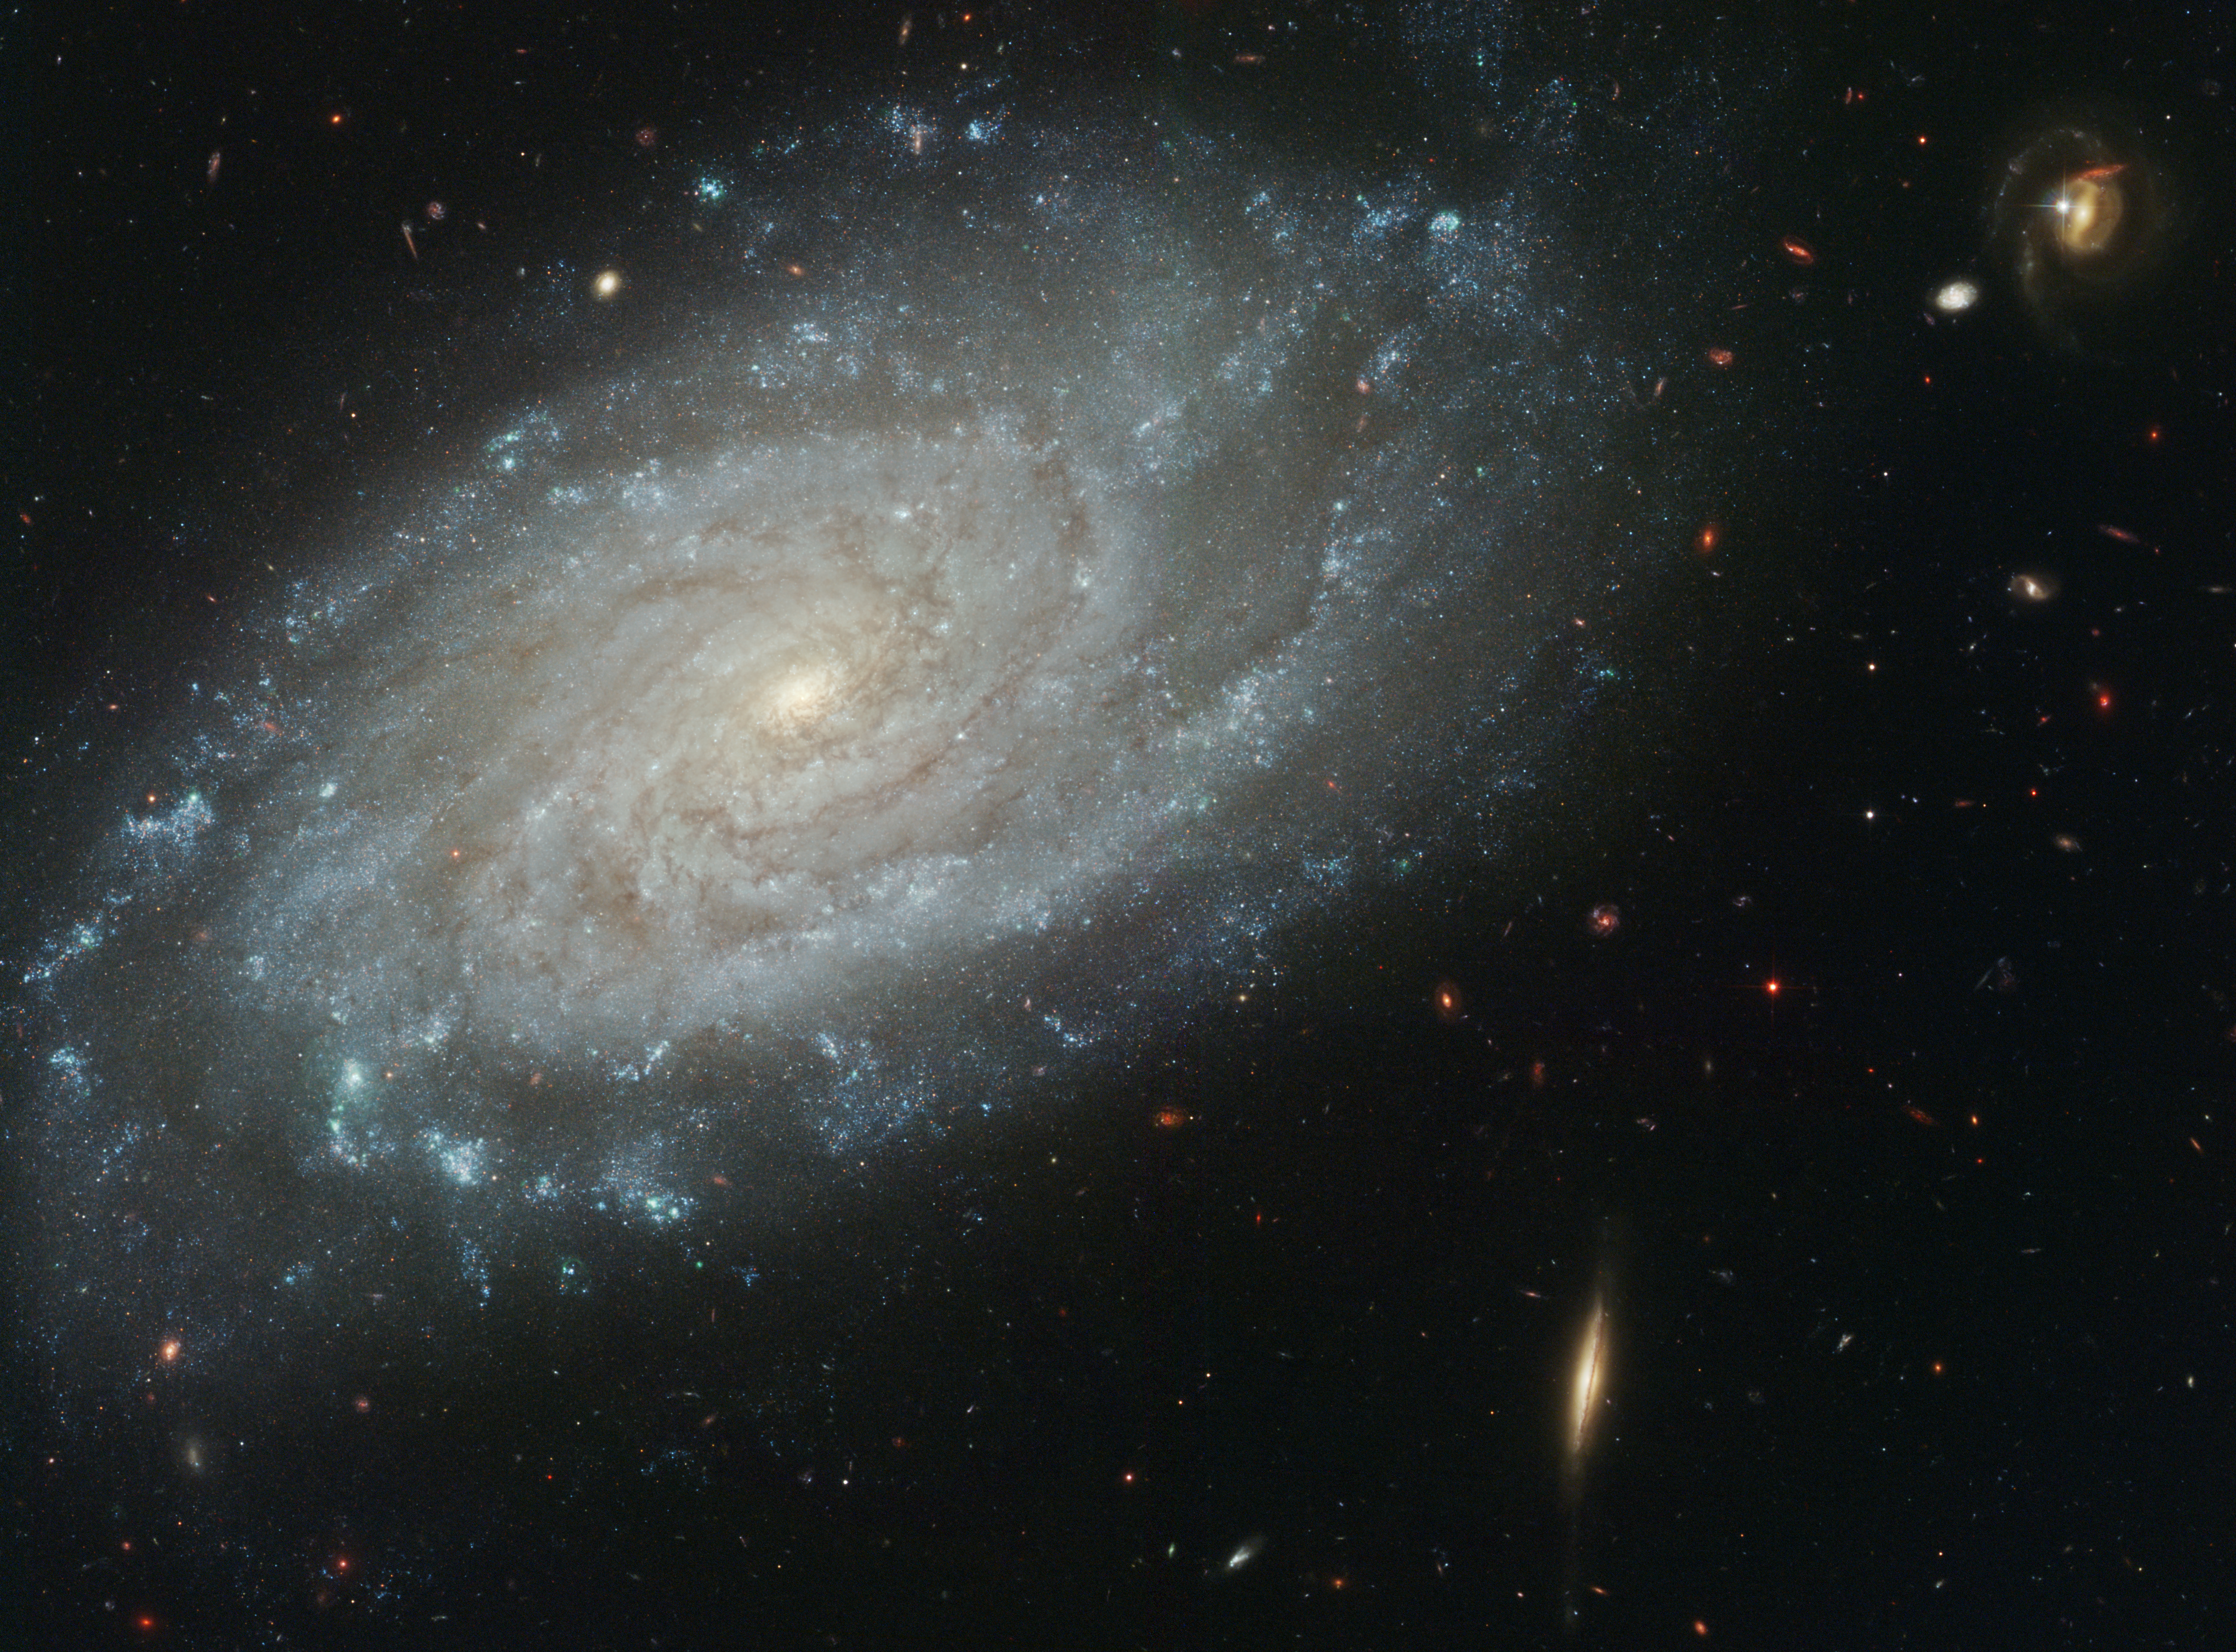

Celestial composition

Amid a backdrop of far-off galaxies, the majestic dusty spiral, NGC 3370, looms in the foreground in this NASA/ESA Hubble Space Telescope image. Recent observations taken with the Advanced Camera for Surveys show intricate spiral arm structure spotted with hot areas of new star formation. But this galaxy is more than just a pretty face. Nearly 10 years earlier NGC 3370, in the constellation Leo, hosted a bright exploding star.

In November 1994, the light of a supernova in nearby NGC 3370 reached Earth. This stellar outburst briefly outshone all of the tens of billions of other stars in its galaxy. Although supernovae are common, with one exploding every few seconds somewhere in the universe, this one was special. Designated SN 1994ae, this supernova was one of the nearest and best observed supernovae since the advent of modern, digital detectors. It resides 98 million light-years (30 megaparsecs) from Earth. The supernova was also a member of a special subclass of supernovae, the type Ia, the best tool astronomers have to chart the growth rate of the expanding universe.

Credit: NASA/ESA, The Hubble Heritage Team and A. Riess (STScI)